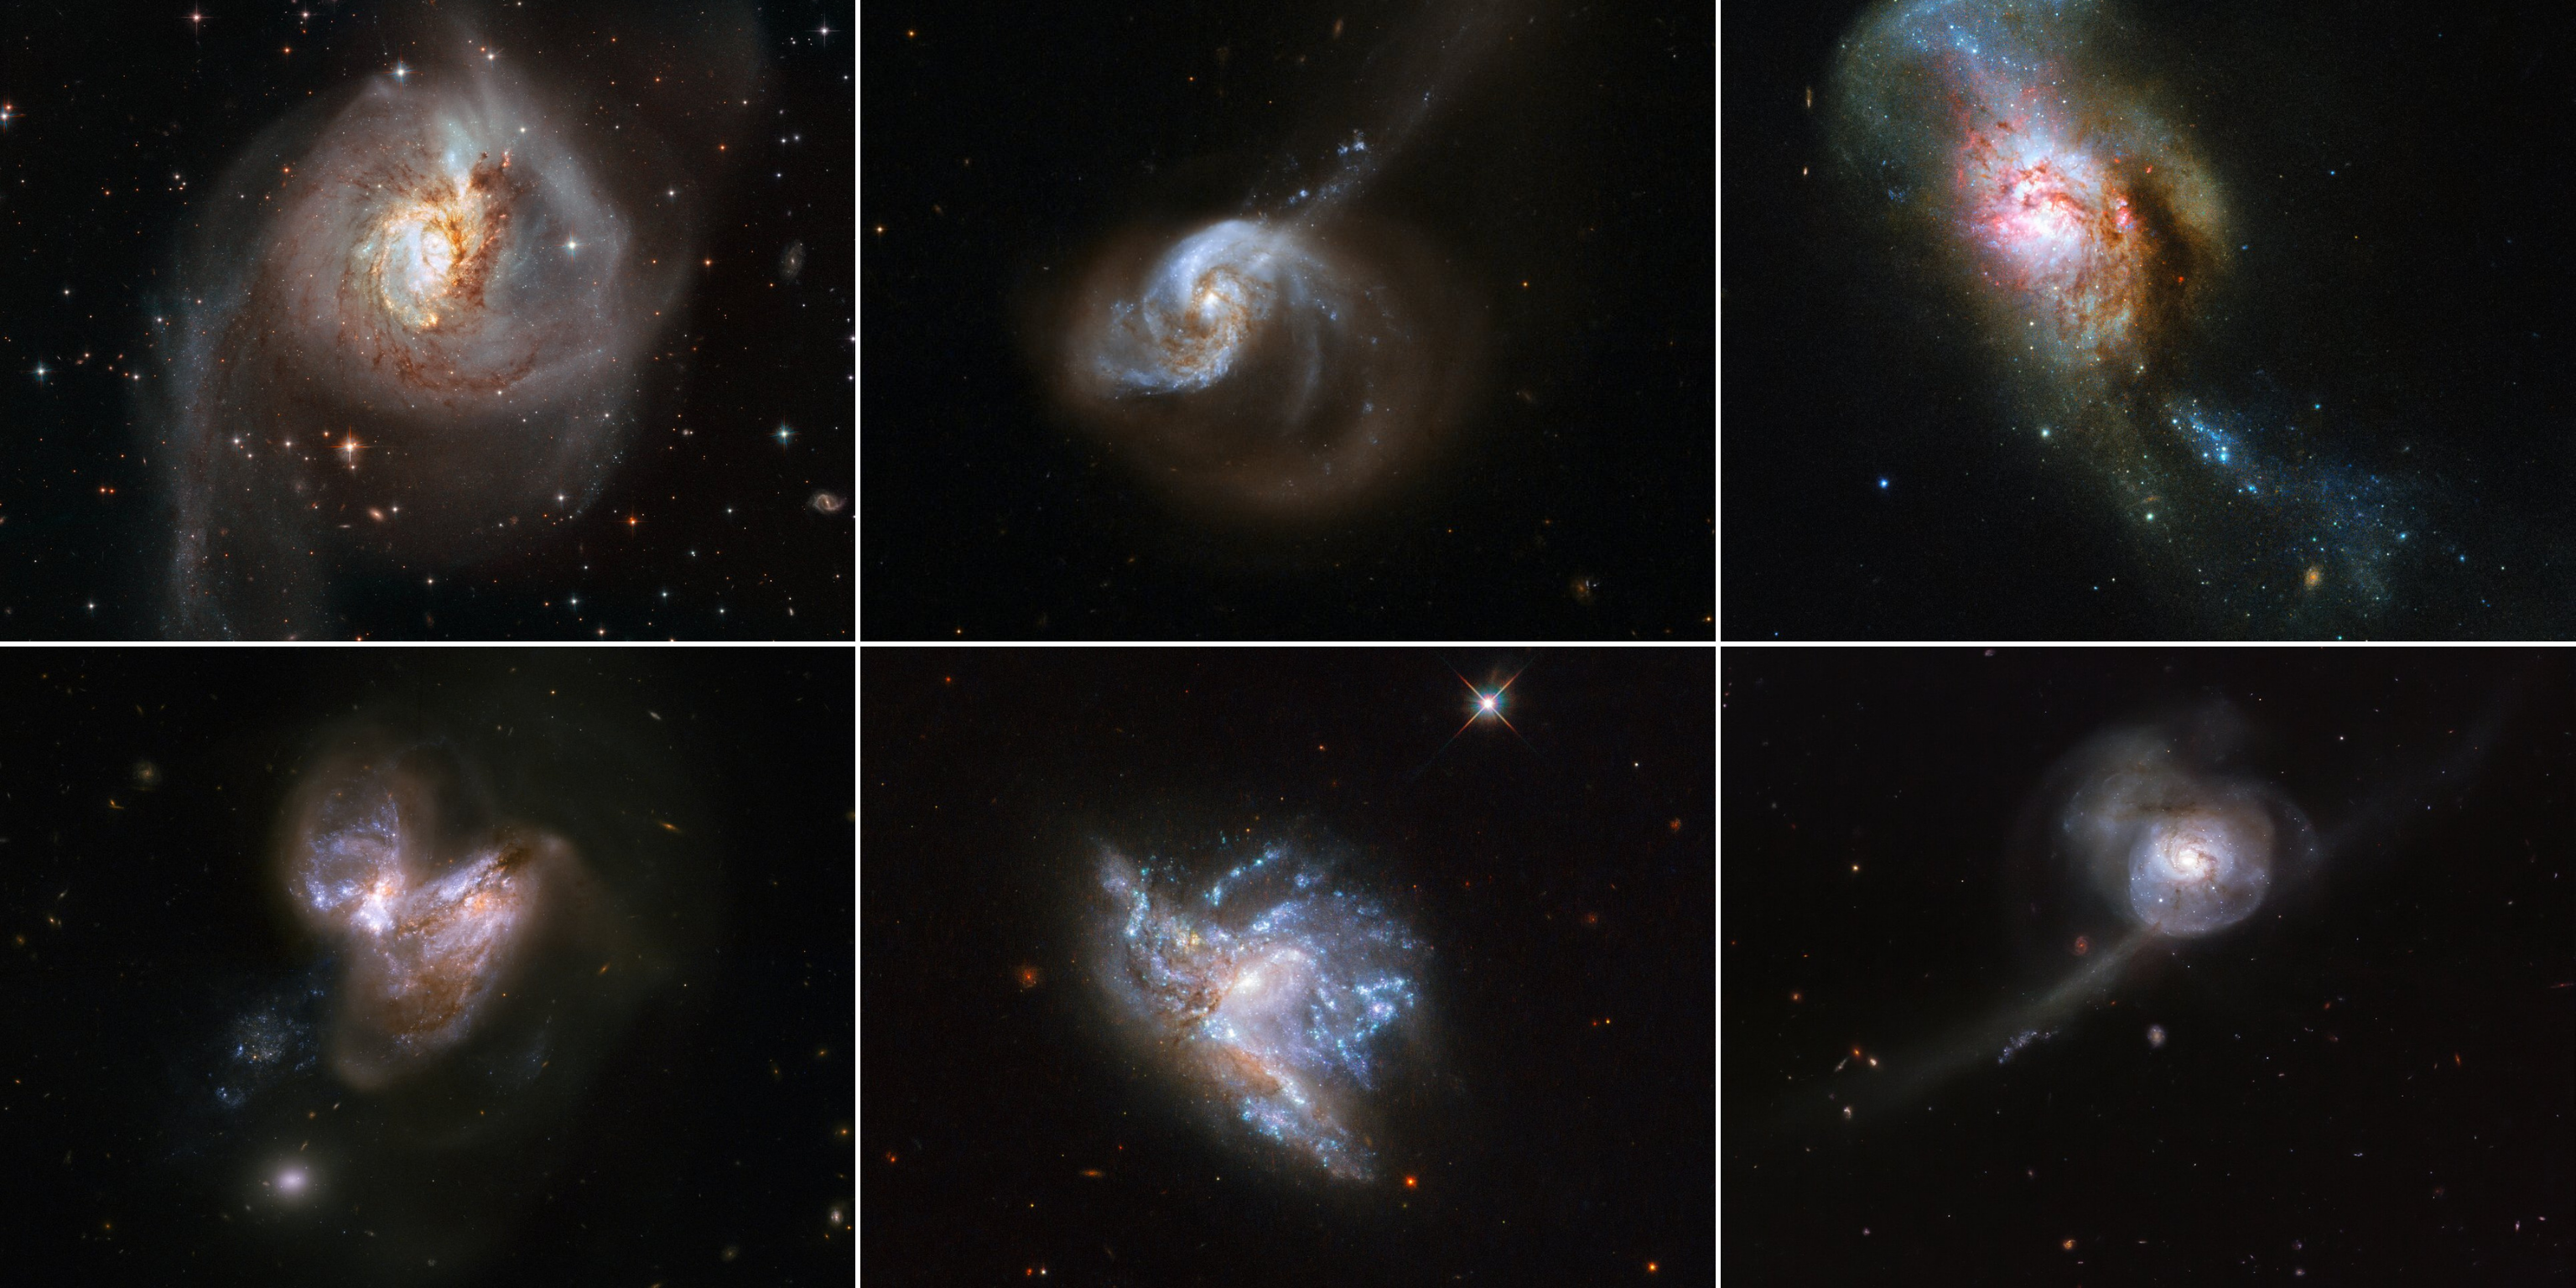

Hubble Showcases 6 Galaxy Mergers

To celebrate a new year, the NASA/ESA Space Telescope has published a montage of six beautiful galaxy mergers. Each of these merging systems was studied as part of the recent HiPEEC survey to investigate the rate of new star formation within such systems. These interactions are a key aspect of galaxy evolution and are among the most spectacular events in the lifetime of a galaxy.

Top left: NGC 3256
This image of NGC 3256 was taken with the Wide Field Camera 3 (WFC3) and the Advanced Camera for Surveys (ACS), both installed on the NASA/ESA Hubble Space Telescope. The galaxy is about 100 million light-years from Earth and provides an ideal target in which to investigate starbursts that have been triggered by galaxy mergers.

Credit: ESA/Hubble, NASA

Top Middle: NGC 1614
The galaxy system NGC 1614 has a bright optical centre and two clear inner spiral arms that are fairly symmetrical. It also has a spectacular outer structure that consists principally of a large one-sided curved extension of one of these arms to the lower right, and a long, almost straight tail that emerges from the nucleus and crosses the extended arm to the upper right.

Credit: NASA, ESA, the Hubble Heritage Team (STScI/AURA)-ESA/Hubble Collaboration and A. Evans (University of Virginia, Charlottesville/NRAO/Stony Brook University)

Top Right: NGC 4194
NGC 4194 is also known as the Medusa merger. An early galaxy consumed a smaller gas-rich system, throwing out streams of stars and dust out into space. These streams, seen rising from the top of the merger galaxy, resemble the writhing snakes that Medusa, a monster in ancient Greek mythology, famously had on her head in place of hair, lending the object its intriguing name. The Medusa merger is located about 130 million light-years away in the constellation of Ursa Major (The Great Bear).

Credit: ESA/Hubble & NASA, A. Adamo

Bottom Left: NGC 3690
This system consists of a pair of galaxies, dubbed IC 694 and NGC 3690, which made a close pass some 700 million years ago. As a result of this interaction, the system underwent a fierce burst of star formation. In the last fifteen years or so six supernovae have popped off in the outer reaches of the galaxy, making this system a distinguished supernova factory.

Credit: NASA, ESA, the Hubble Heritage Team (STScI/AURA)-ESA/Hubble Collaboration and A. Evans (University of Virginia, Charlottesville/NRAO/Stony Brook University)

Bottom Middle: NGC 6052
Located in the constellation of Hercules, about 230 million light-years away, NGC 6052 is a pair of colliding galaxies. They were first discovered in 1784 by William Herschel and were originally classified as a single irregular galaxy because of their odd shape. However, we now know that NGC 6052 actually consists of two galaxies that are in the process of colliding. This particular image of NGC 6052 was taken using Hubble’s Wide Field Camera 3.

Credit: ESA/Hubble & NASA, A. Adamo et al.

Bottom Right: NGC 34
Lying in the constellation Cetus (The Sea Monster), NGC 34’s outer region appears almost translucent, pin pricked with stars and strange wispy tendrils. This image shows the galaxy's bright centre, a result of this merging event that has created a burst of new star formation and lit up the surrounding gas. As the galaxies continue to intertwine and become one, NGC 34’s shape will become more like that of a peculiar galaxy, devoid of any distinct shape.

Credit: ESA/Hubble & NASA, A. Adamo et al.

Credit: NASA & ESA